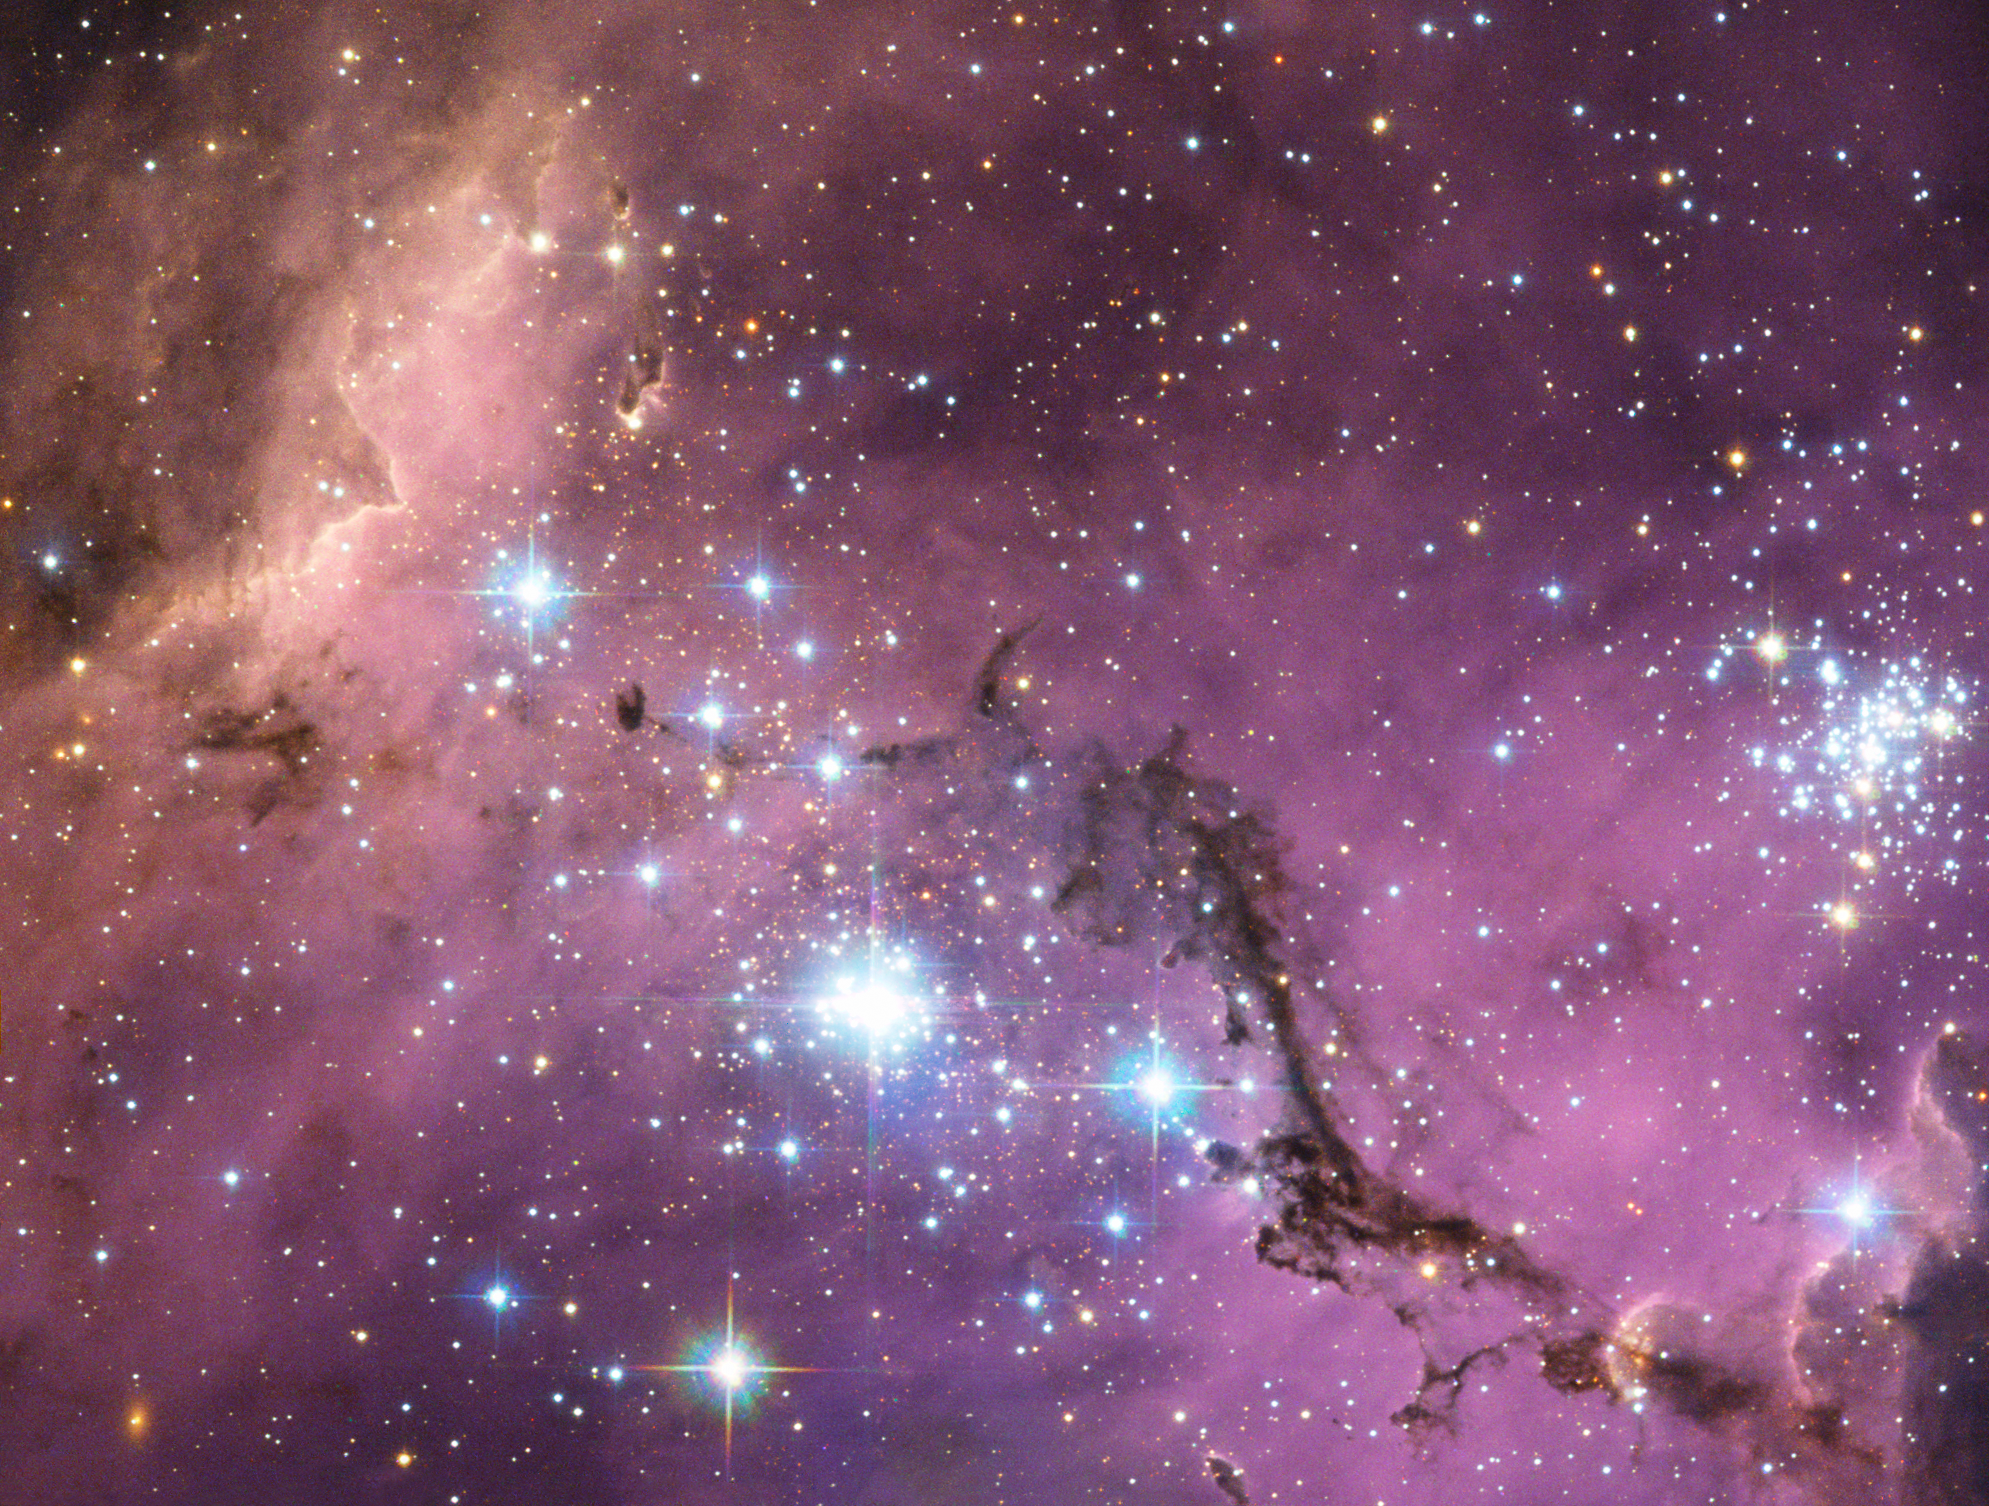

LHA 120-N11 in the Large Magellanic Cloud

Nearly 200 000 light-years from Earth, the Large Magellanic Cloud, a satellite galaxy of the Milky Way, floats in space, in a long and slow dance around our galaxy. As the Milky Way’s gravity gently tugs on its neighbour’s gas clouds, they collapse to form new stars. In turn, these light up the gas clouds in a kaleidoscope of colours, visible in this image from the NASA/ESA Hubble Space Telescope.

Credit: NASA, ESA. Acknowledgement: Josh Lake